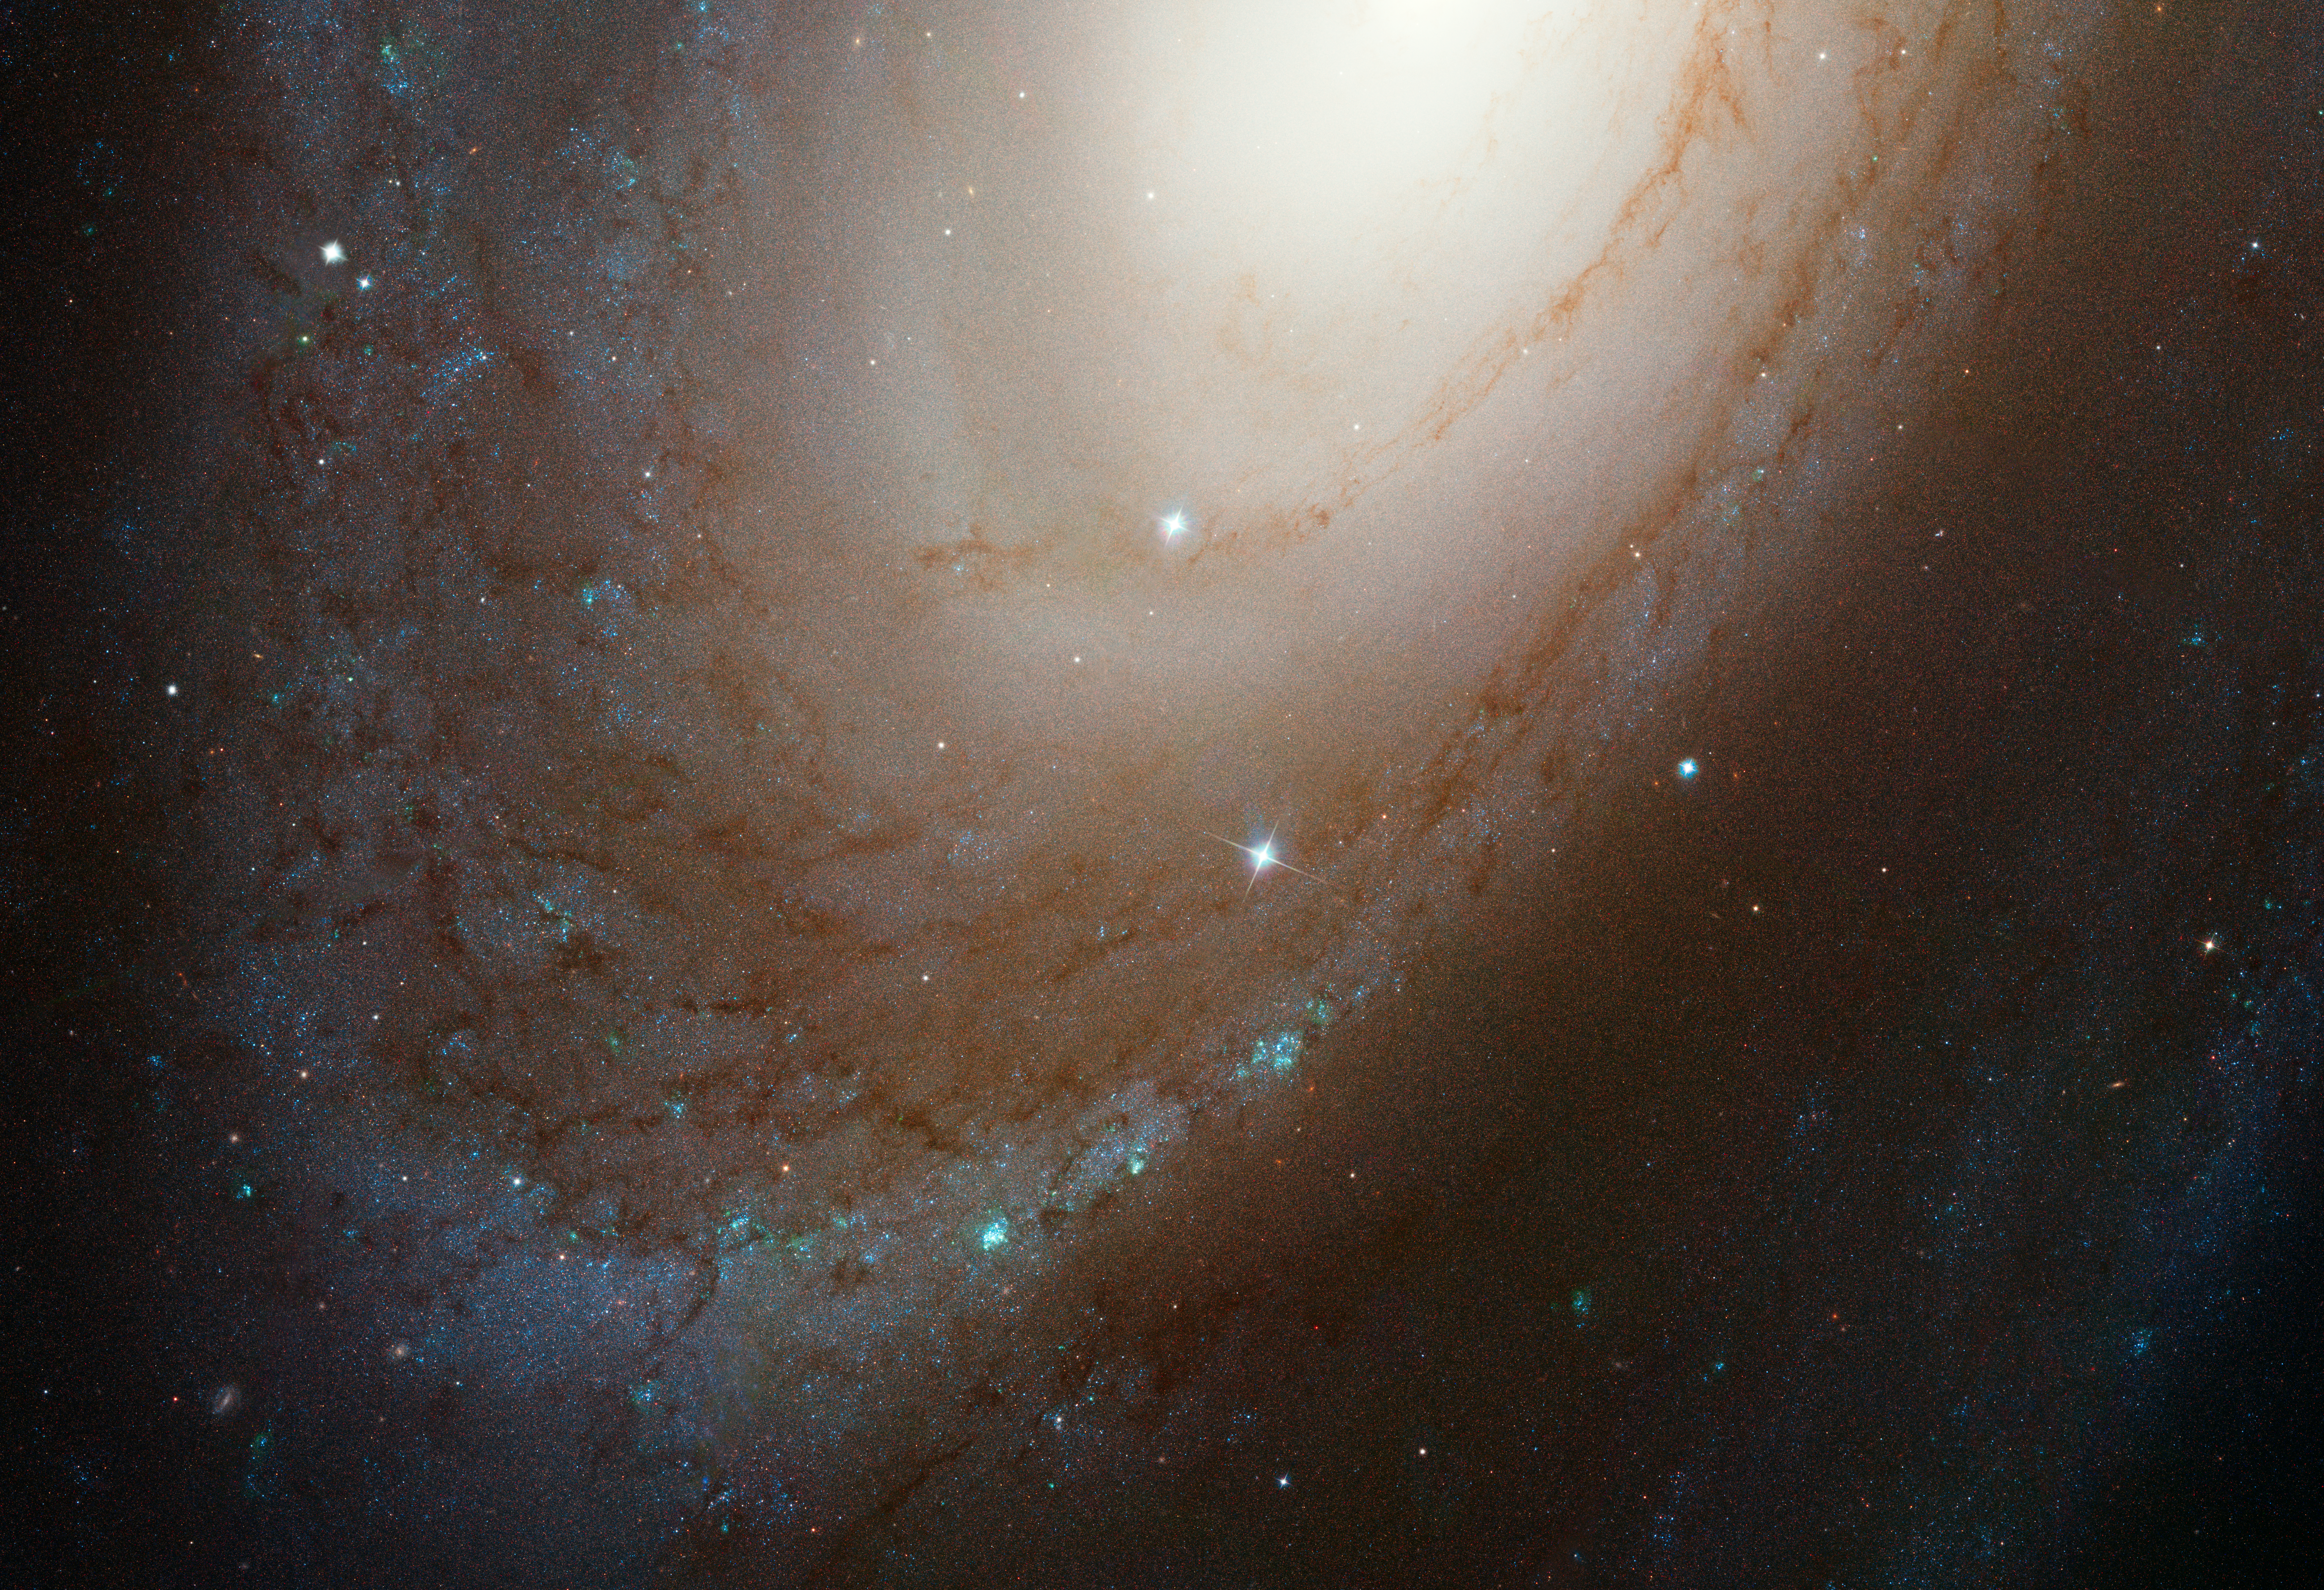

Spiral galaxy M81

This NASA/ESA Hubble Space Telescope photo shows the majestic spiral galaxy M81.

In the midsts of this galaxy is the supernova 1993J which was recently found to have a companion star which had been hidden in the glow of the supernova for 21 years. The location of the supernova can be seen in the annotated version of this image.

Credit: NASA, ESA, A. Zezas (CfA), and A. Filippenko (UC Berkeley) Acknowledgment: Hubble Heritage Team (STScI/AURA) & O. Fox (University of California, Berkeley)